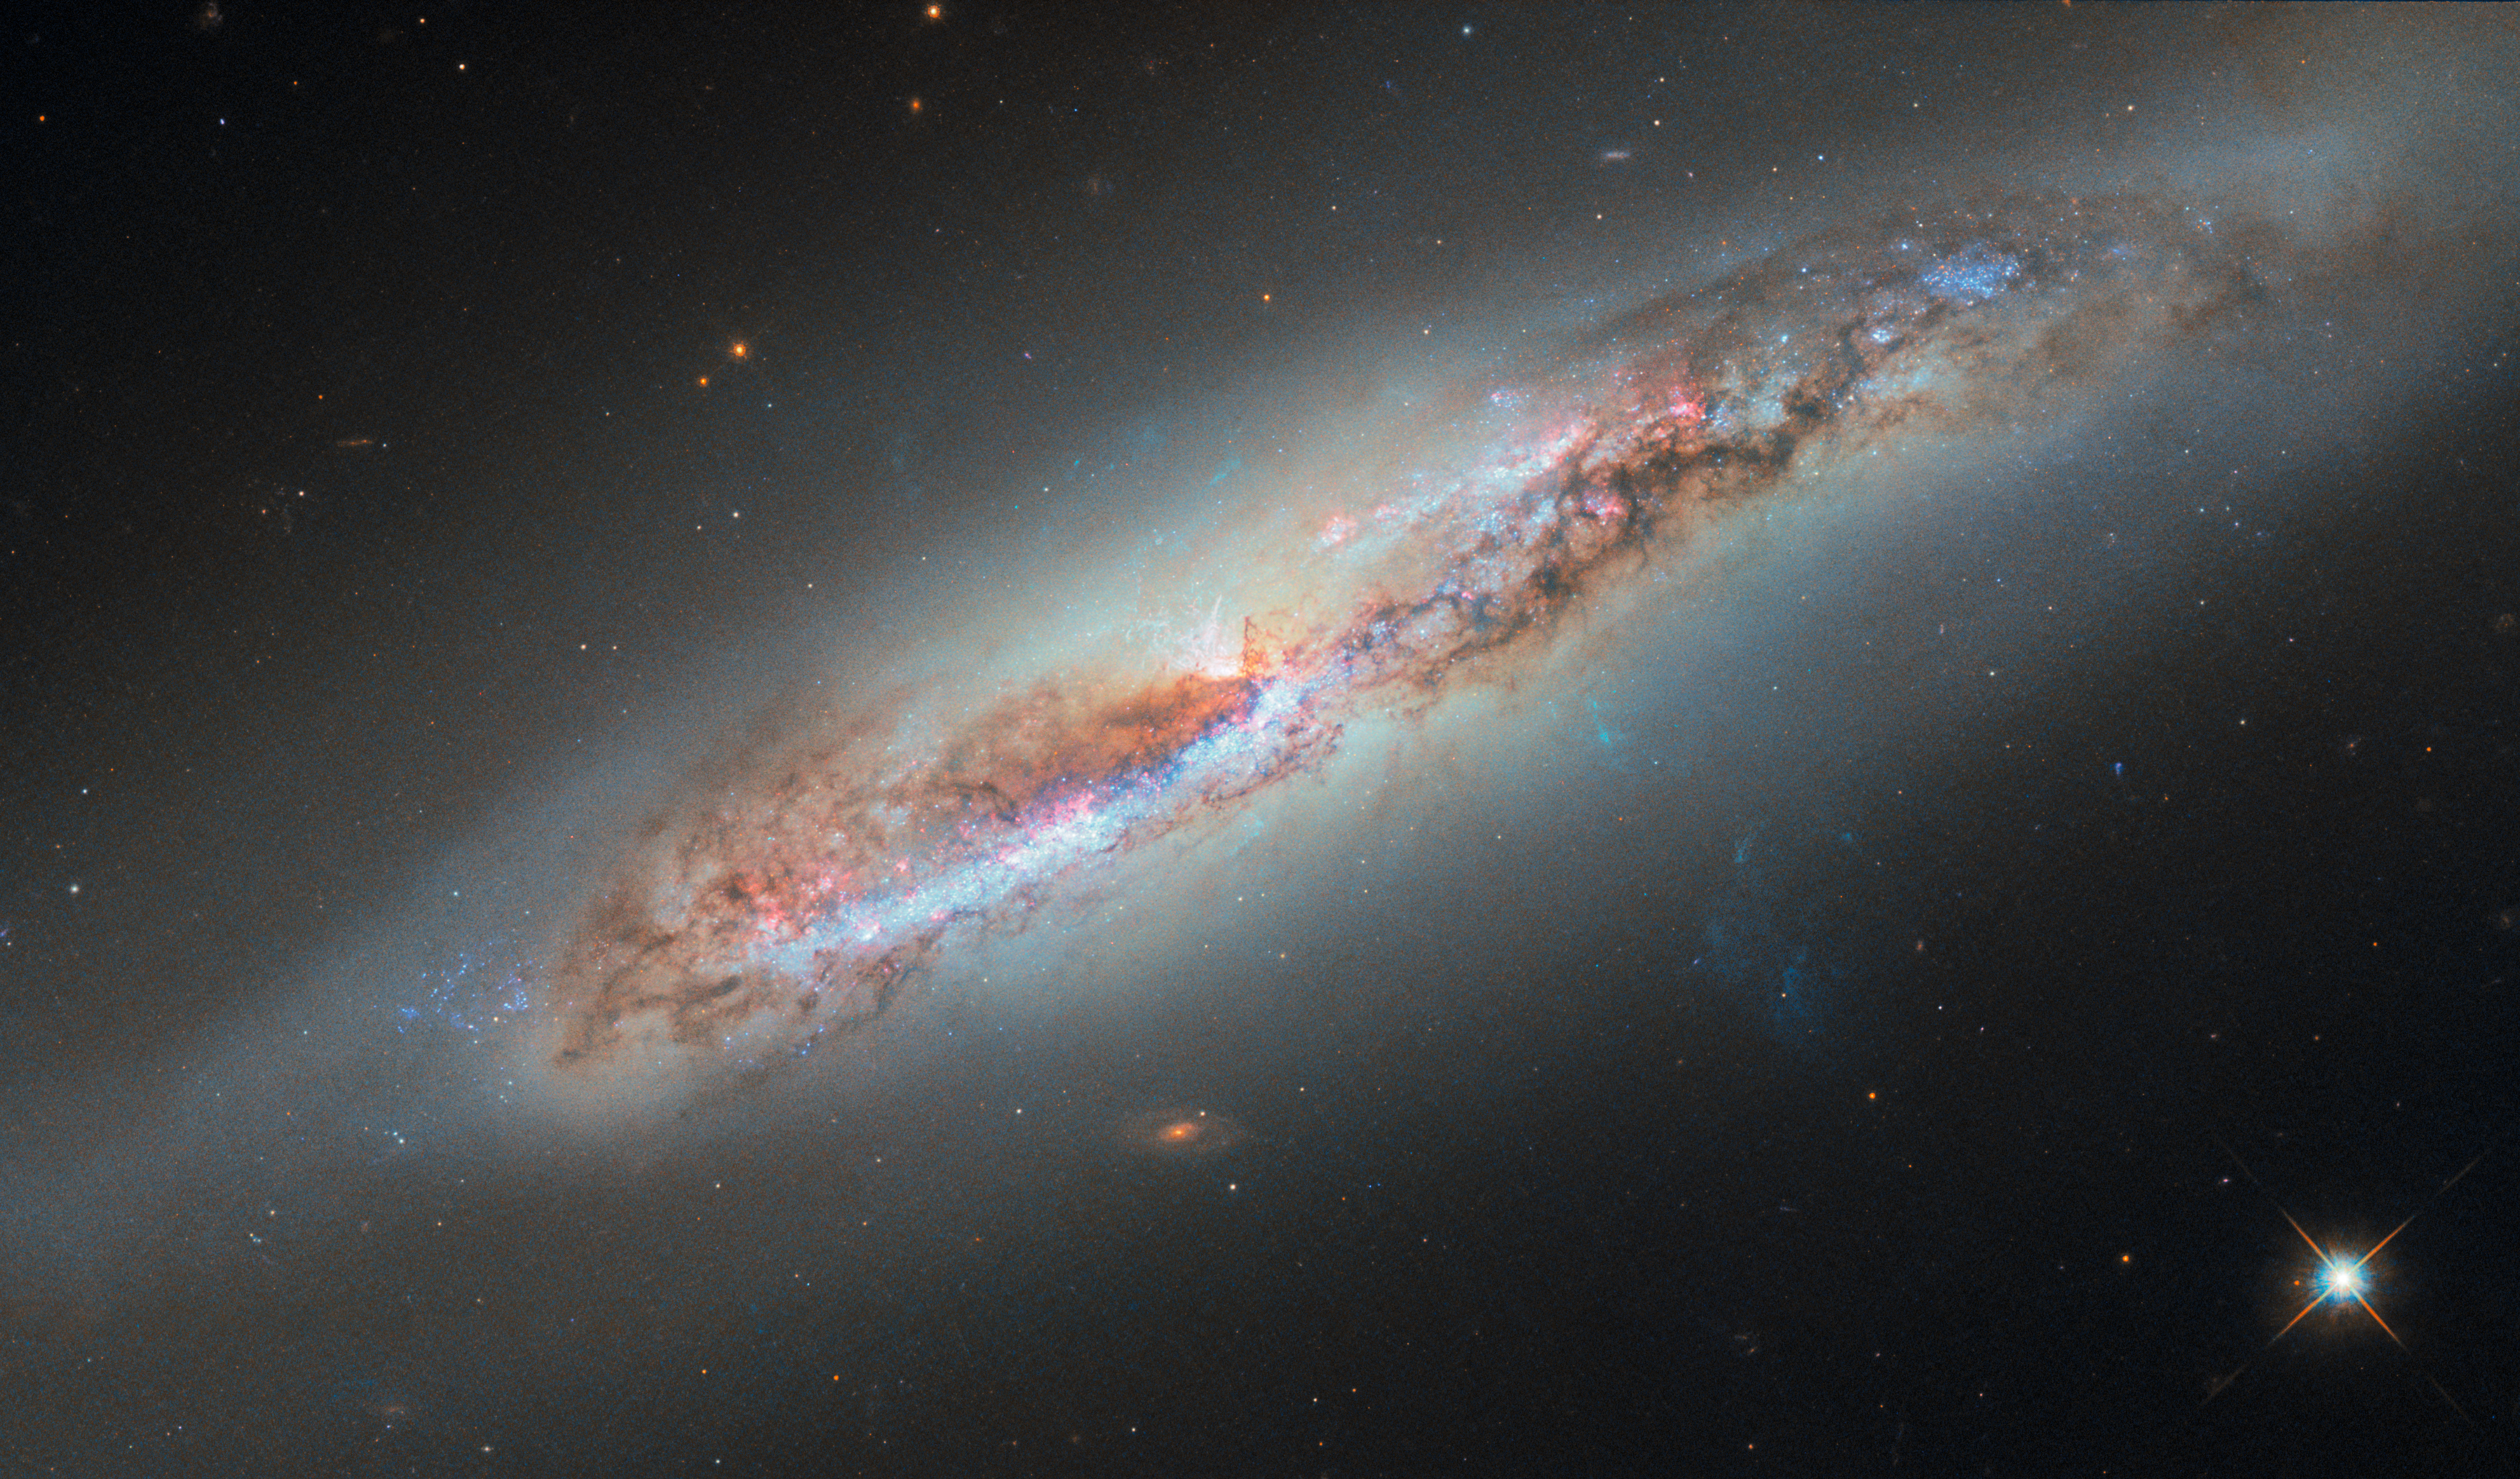

Galactic gas makes a getaway

A sideways spiral galaxy shines in today’s ESA/Hubble Picture of the Week. Located about 60 million light-years away in the constellation Virgo (The Maiden), NGC 4388 is a resident of the Virgo galaxy cluster. The Virgo cluster contains more than a thousand galaxies and is the nearest large galaxy cluster to the Milky Way.

NGC 4388 is tilted at an extreme angle relative to our point of view, giving us a nearly edge-on vantage point. This perspective reveals a curious feature that wasn’t visible in a previous Hubble image of this galaxy released in 2016: a plume of gas from the galaxy’s nucleus, here seen billowing out from the galaxy’s disc towards the lower-right corner of the image. But where did this outflow come from, and why does it glow?

The answer likely lies in vast stretches that separate the galaxies of the Virgo cluster. Though the space between the galaxies appears to be empty, this space is actually occupied by hot wisps of gas called the intracluster medium. As NGC 4388 journeys within the cluster, it plunges through the intracluster medium. The pressure from the hot intracluster gas whisks away the gas from within NGC 4388’s disc, causing it to trail behind as NGC 4388 moves.

The source of the energy that ionises this gas cloud and causes it to glow is more uncertain. Researchers suspect that some of the energy comes from the centre of the galaxy, where a supermassive black hole has spun the gas around it into a superheated disc. The blazing radiation from this disc might ionise the gas closest to the galaxy, while shock waves might be responsible for ionising the filaments of gas farther out.

This image incorporates new data including several additional wavelengths of light to bring the ionised gas cloud into view. The data used to create this image come from several observing programmes that aim to illuminate galaxies with active black holes at their centres.

Credit: ESA/Hubble & NASA, S. Veilleux, J. Wang, J. Greene